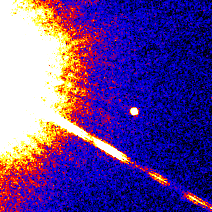

Brown Dwarf Gliese 299B

This image of the GL229B (center) was taken with Hubble Space Telescope's Wide Field Planetary Camera-2, in far red light, on November 17, 1995.

The Hubble observations will be used to accurately measure the brown dwarf's distance from Earth, and yield preliminary data on its orbital period, which may eventually offer clues to the dwarf's origin.

Credit: S. Kulkarni (Caltech), D.Golimowski (JHU) and NASA/ESA